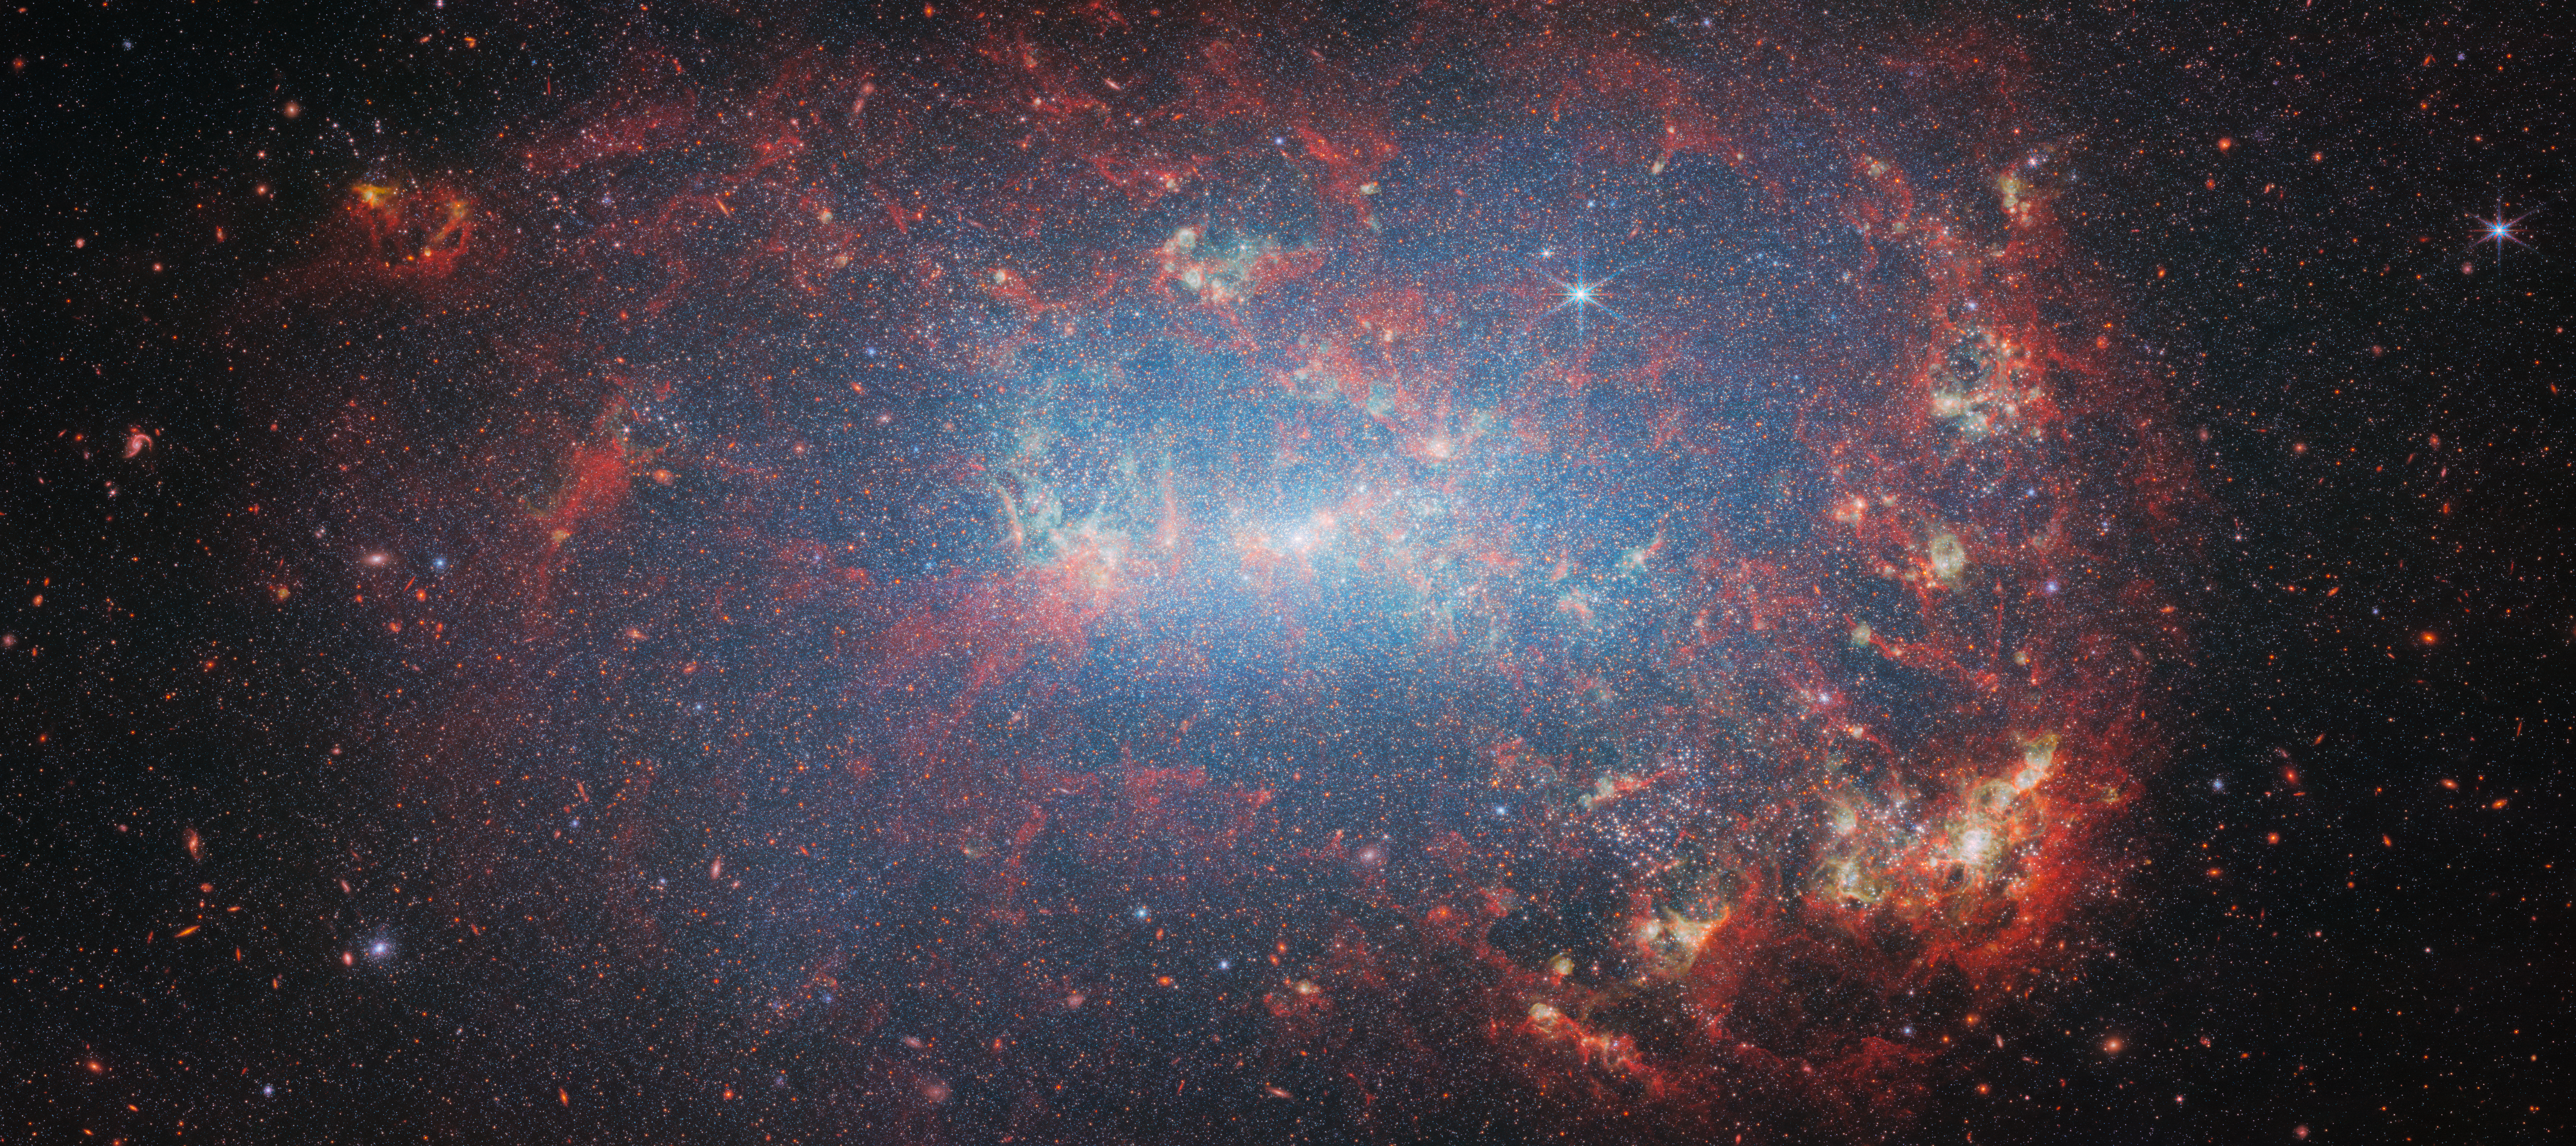

NGC 4449 (NIRCam)

Featured in this new image from the NASA/ESA/CSA James Webb Space Telescope is the dwarf galaxy NGC 4449. This galaxy, also known as Caldwell 21, resides roughly 12.5 million light-years away in the constellation Canes Venatici. It is part of the M94 galaxy group, which lies close to the Local Group that hosts our Milky Way.

NGC 4449 has been forming stars for several billion years, but it is currently experiencing a period of star formation at a much higher rate than in the past. Such unusually explosive and intense star formation activity is called a starburst and for that reason NGC 4449 is known as a starburst galaxy. In fact, at the current rate of star formation, the gas supply that feeds the production of stars would only last for another billion years or so. Starbursts usually occur in the central regions of galaxies, but NGC 4449 displays more widespread star formation activity, and the very youngest stars are observed both in the nucleus and in streams surrounding the galaxy. It's likely that the current widespread starburst was triggered by interaction or merging with a smaller companion; indeed, astronomers think NGC 4449's star formation has been influenced by interactions with several of its neighbours.

NGC 4449 resembles primordial star-forming galaxies which grew by merging with and accreting smaller stellar systems. Since NGC 4449 is close enough to be observed in great detail, it is the ideal laboratory for astronomers to study what may have occurred during galaxy formation and evolution in the early Universe.

The image was captured by Webb’s NIRCam, or Near-InfraRed Camera. In this image, the bright red spots correspond to regions rich in hydrogen that have been ionised by the radiation from the newly formed stars. The diffuse gradient of blue light around the central region shows the distribution of older stars. The compact light-blue regions within the red ionised gas, mostly concentrated in the galaxy’s outer region, show the distribution of young star clusters.

Credit: ESA/Webb, NASA & CSA, A. Adamo (Stockholm University) and the FEAST JWST team